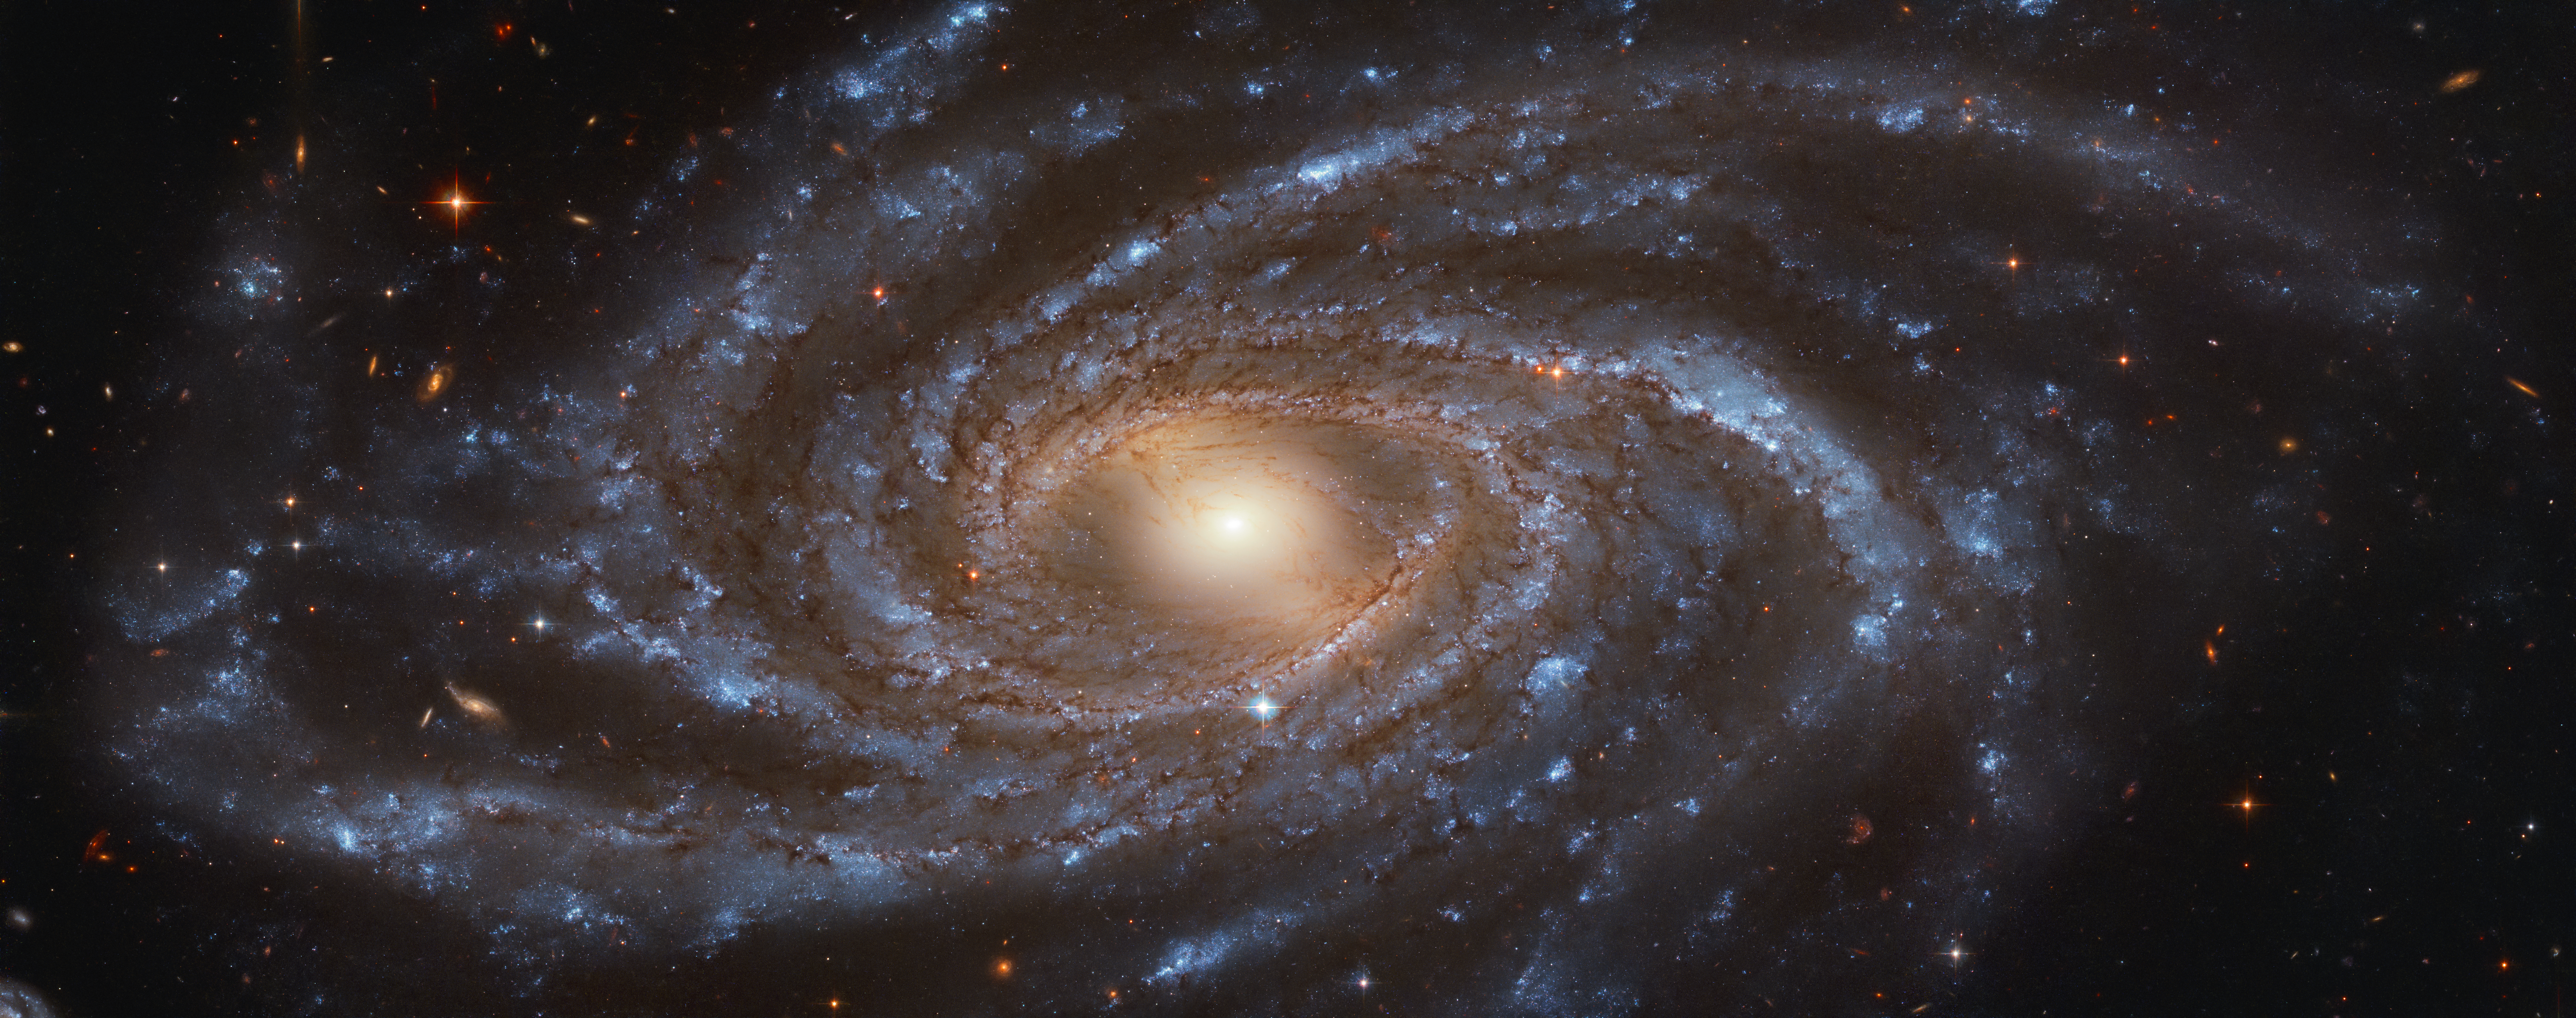

Big, Beautiful and Blue

NGC 2336 is the quintessential galaxy — big, beautiful and blue — and it is captured here by the NASA/ESA Hubble Space Telescope. The barred spiral galaxy stretches an immense 200 000 light-years across and is located approximately 100 million light years away in the northern constellation of Camelopardalis (The Giraffe).

Its spiral arms are glittered with young stars, visible in their bright blue light. In contrast, the redder central part of the galaxy is dominated by older stars.

NGC 2336 was discovered in 1876 by German astronomer Wilhelm Tempel, using a 28-centimetre telescope. This Hubble image is so much better than the view Tempel would have had — Hubble’s main mirror is 2.4 metres across, nearly ten times the size of the telescope Tempel used. In 1987, NGC 2336 experienced a Type-Ia supernova, the only observed supernova in the galaxy since its discovery 111 years earlier.

Credit: ESA/Hubble & NASA, V. Antoniou Acknowledgement: Judy Schmidt